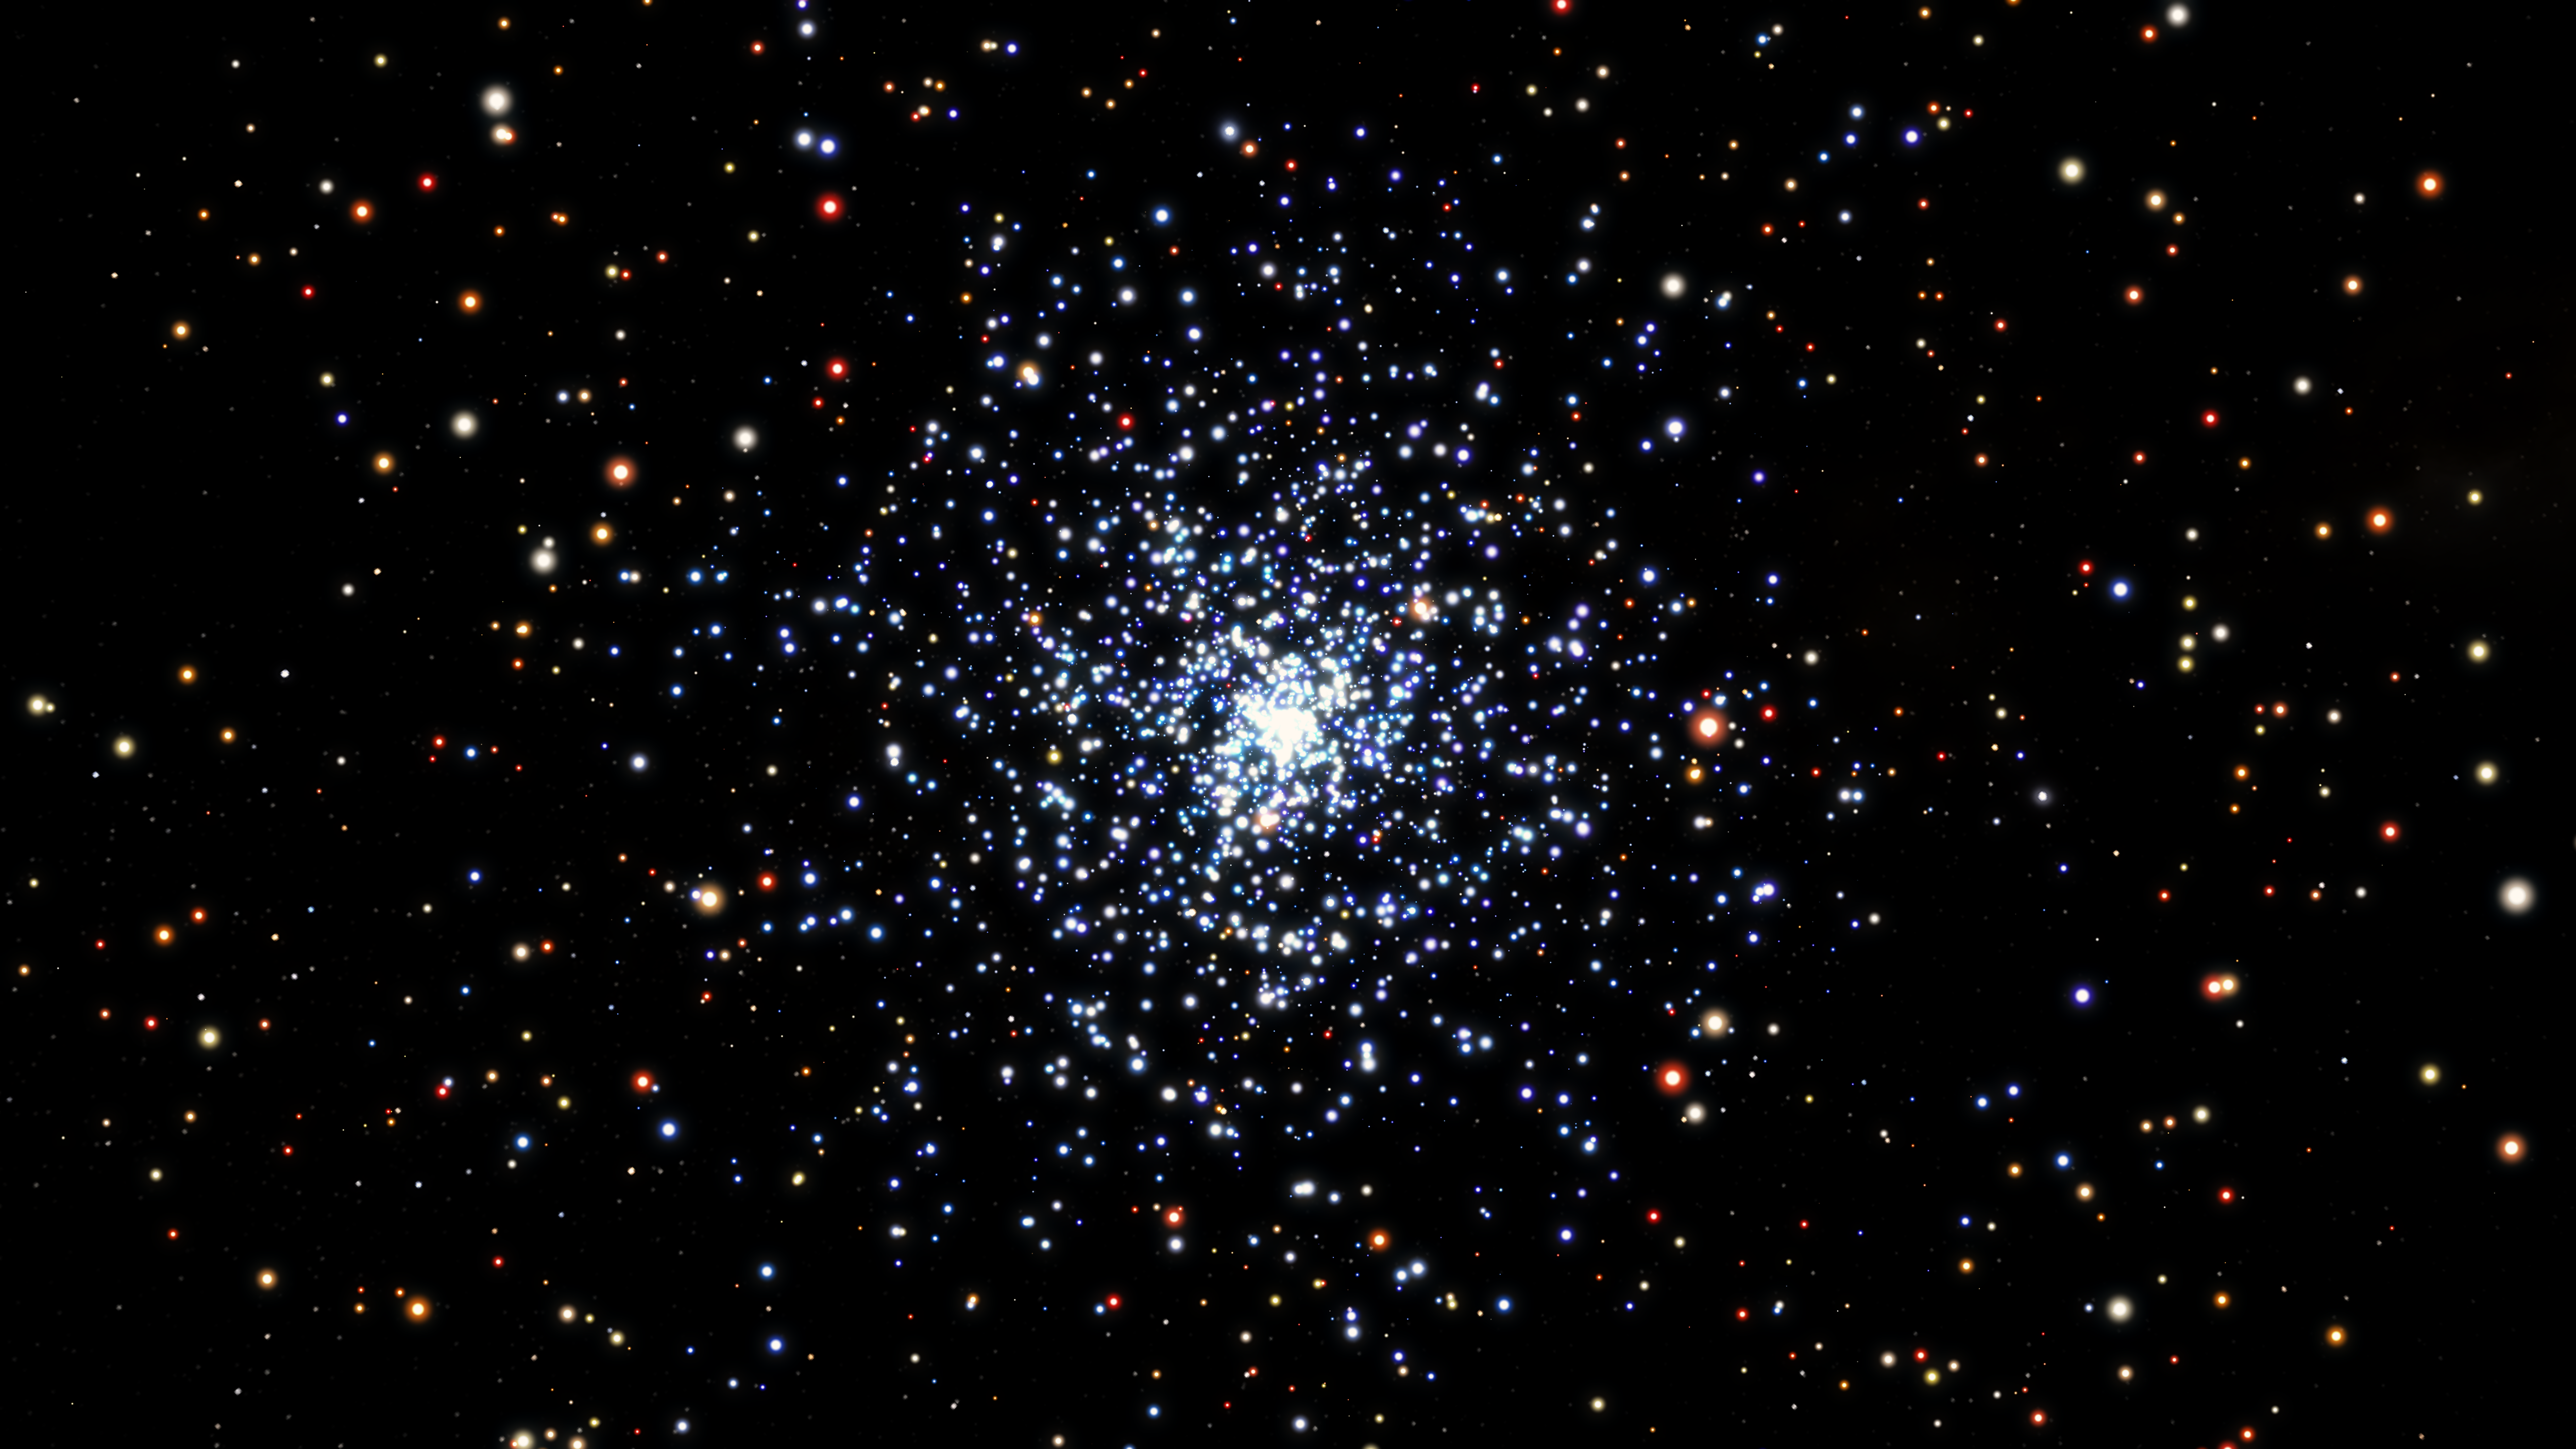

Artist’s Impression of Blue Stragglers

Blue straggler stars are blue, bright stars, with a higher mass than the average for a cluster, and they are expected to sink towards the centre of a star cluster over time. Those closest to the cluster core are the first to migrate inwards, with more distant blue stragglers progressively moving inwards over time.

Credit: ESA/Hubble & NASA, L. Calçada